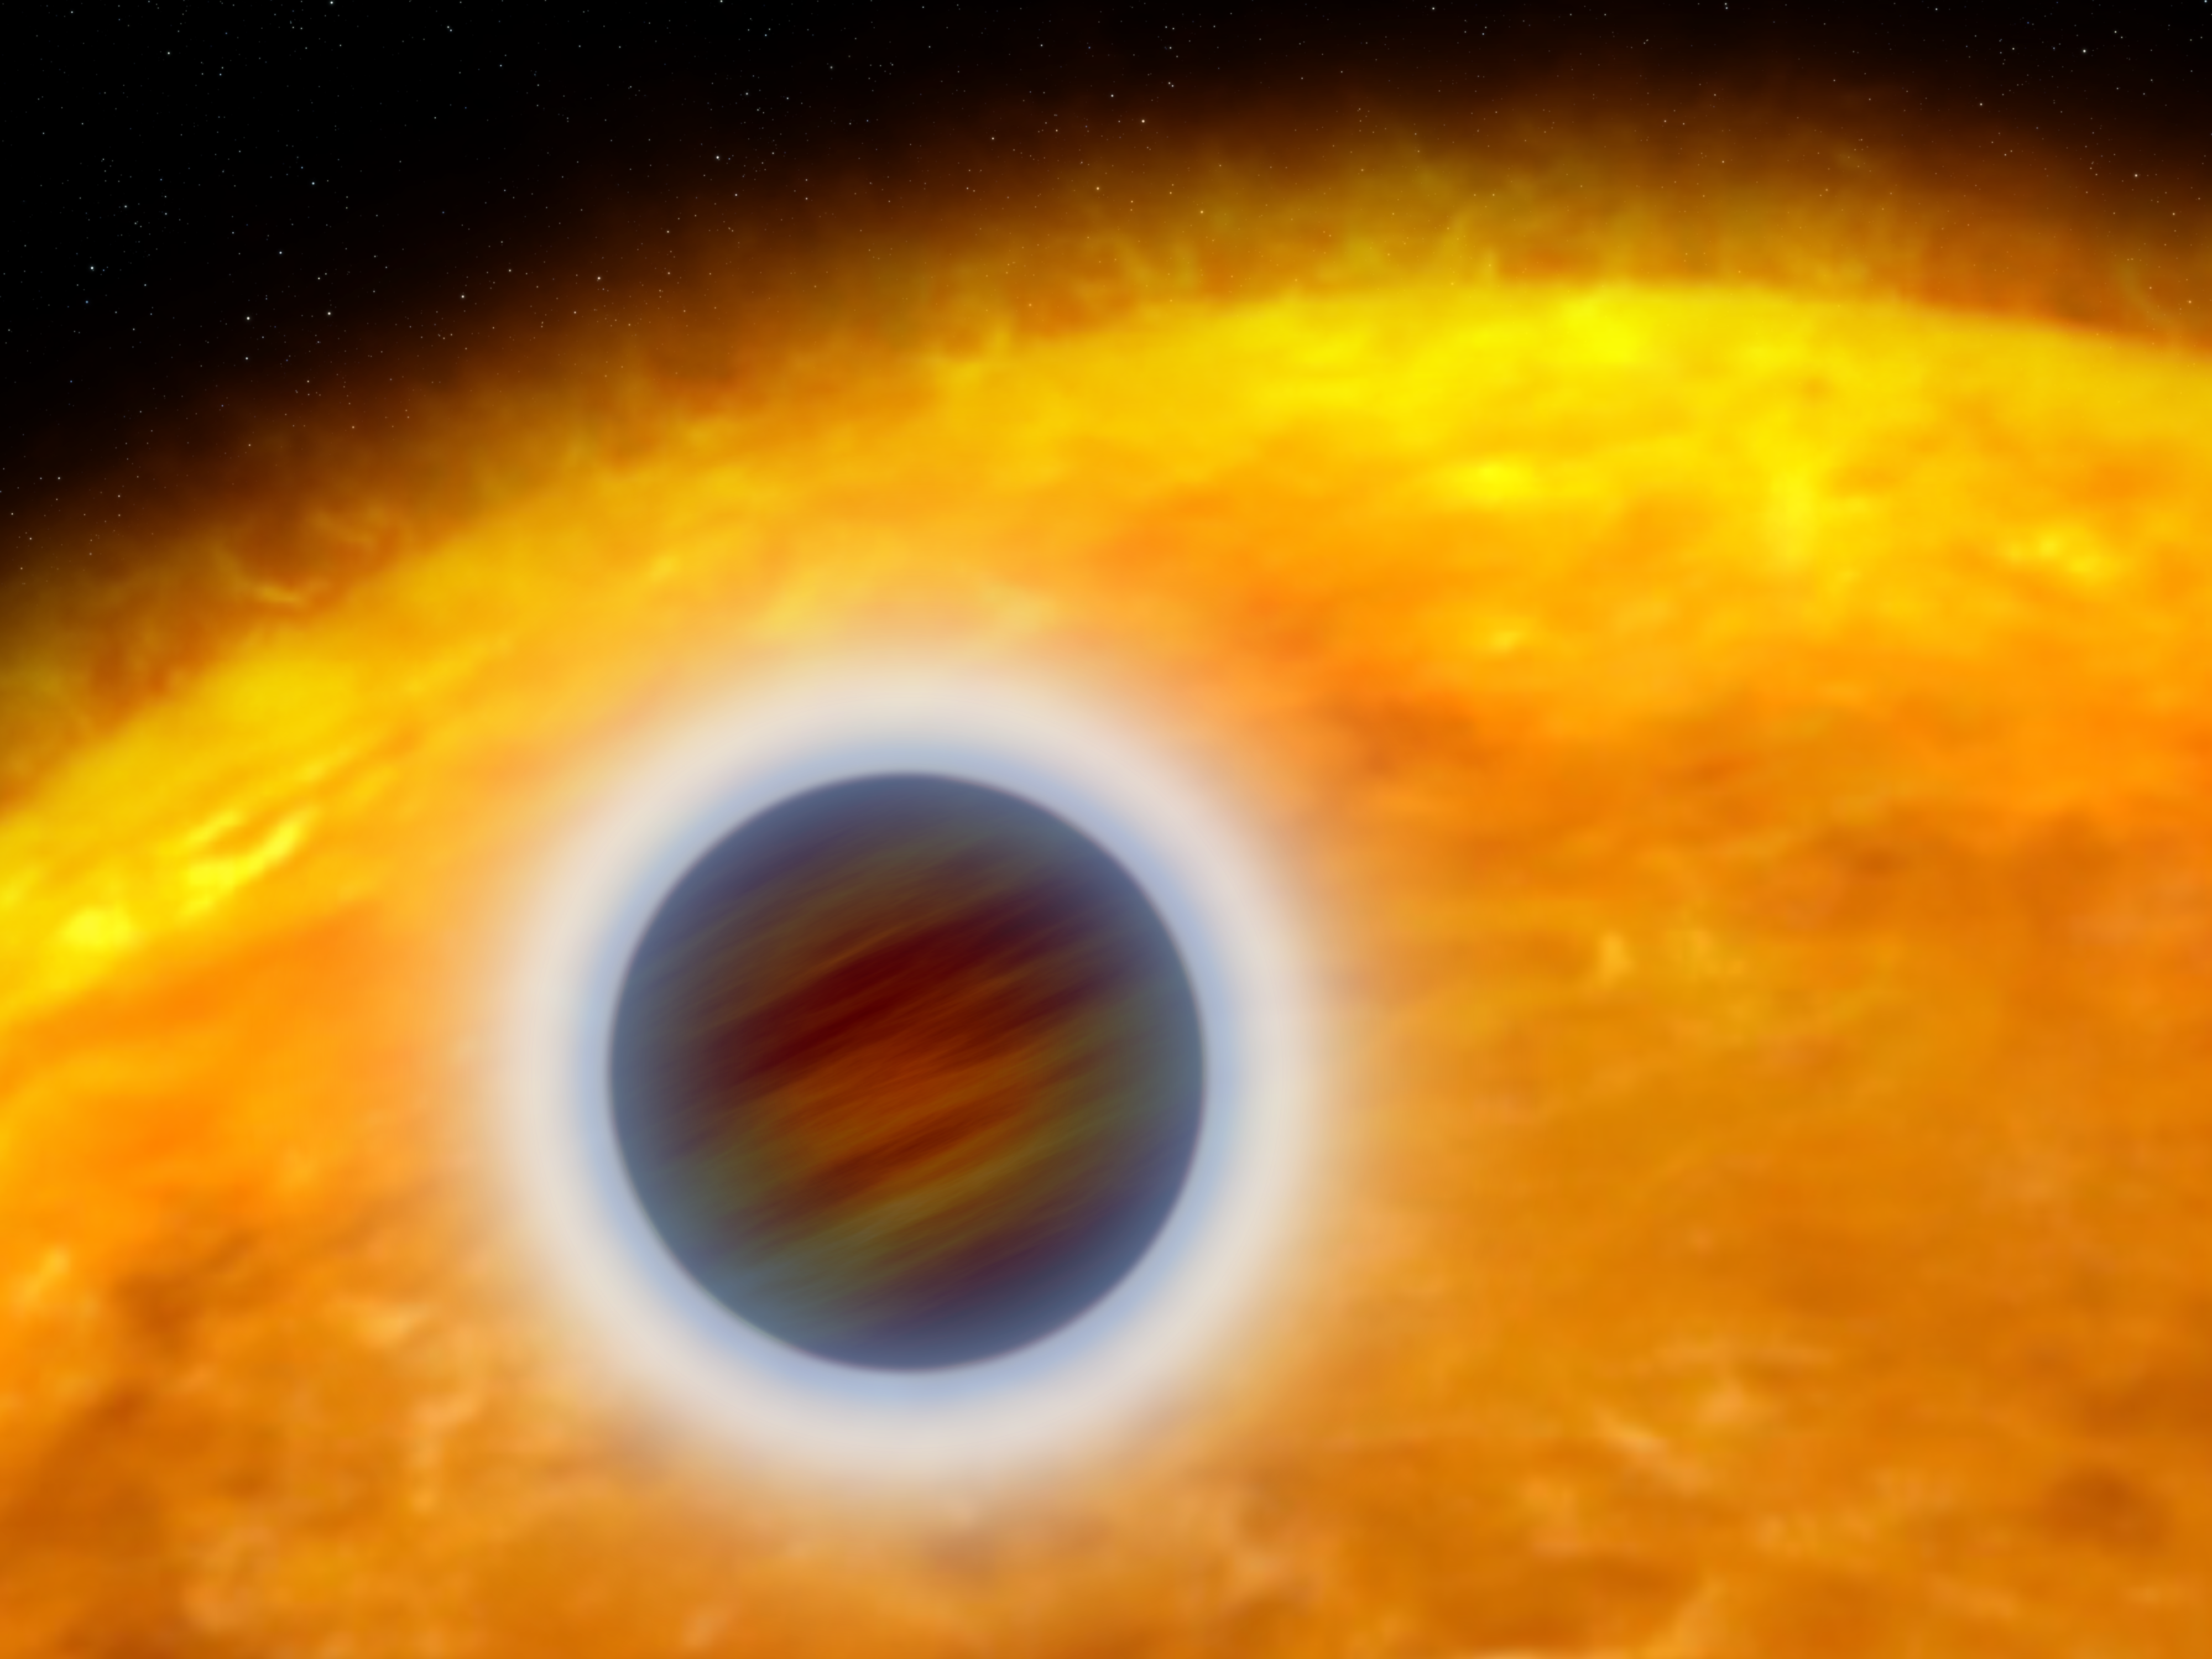

Puffed-up Atmosphere of a Star-hugging Gas Giant Planet (artist's impression)

This artist's illustration shows an extrasolar planet orbiting very close to its host star. The planet designated HD 209458b, is about the size of Jupiter. Unlike Jupiter, the planet is so hot that its atmosphere is "puffed up." Starlight is heating the planet's atmosphere, causing hot gas to escape into space, like steam rising from a boiler.

Credit: NASA, ESA, and G. Bacon (STScI)